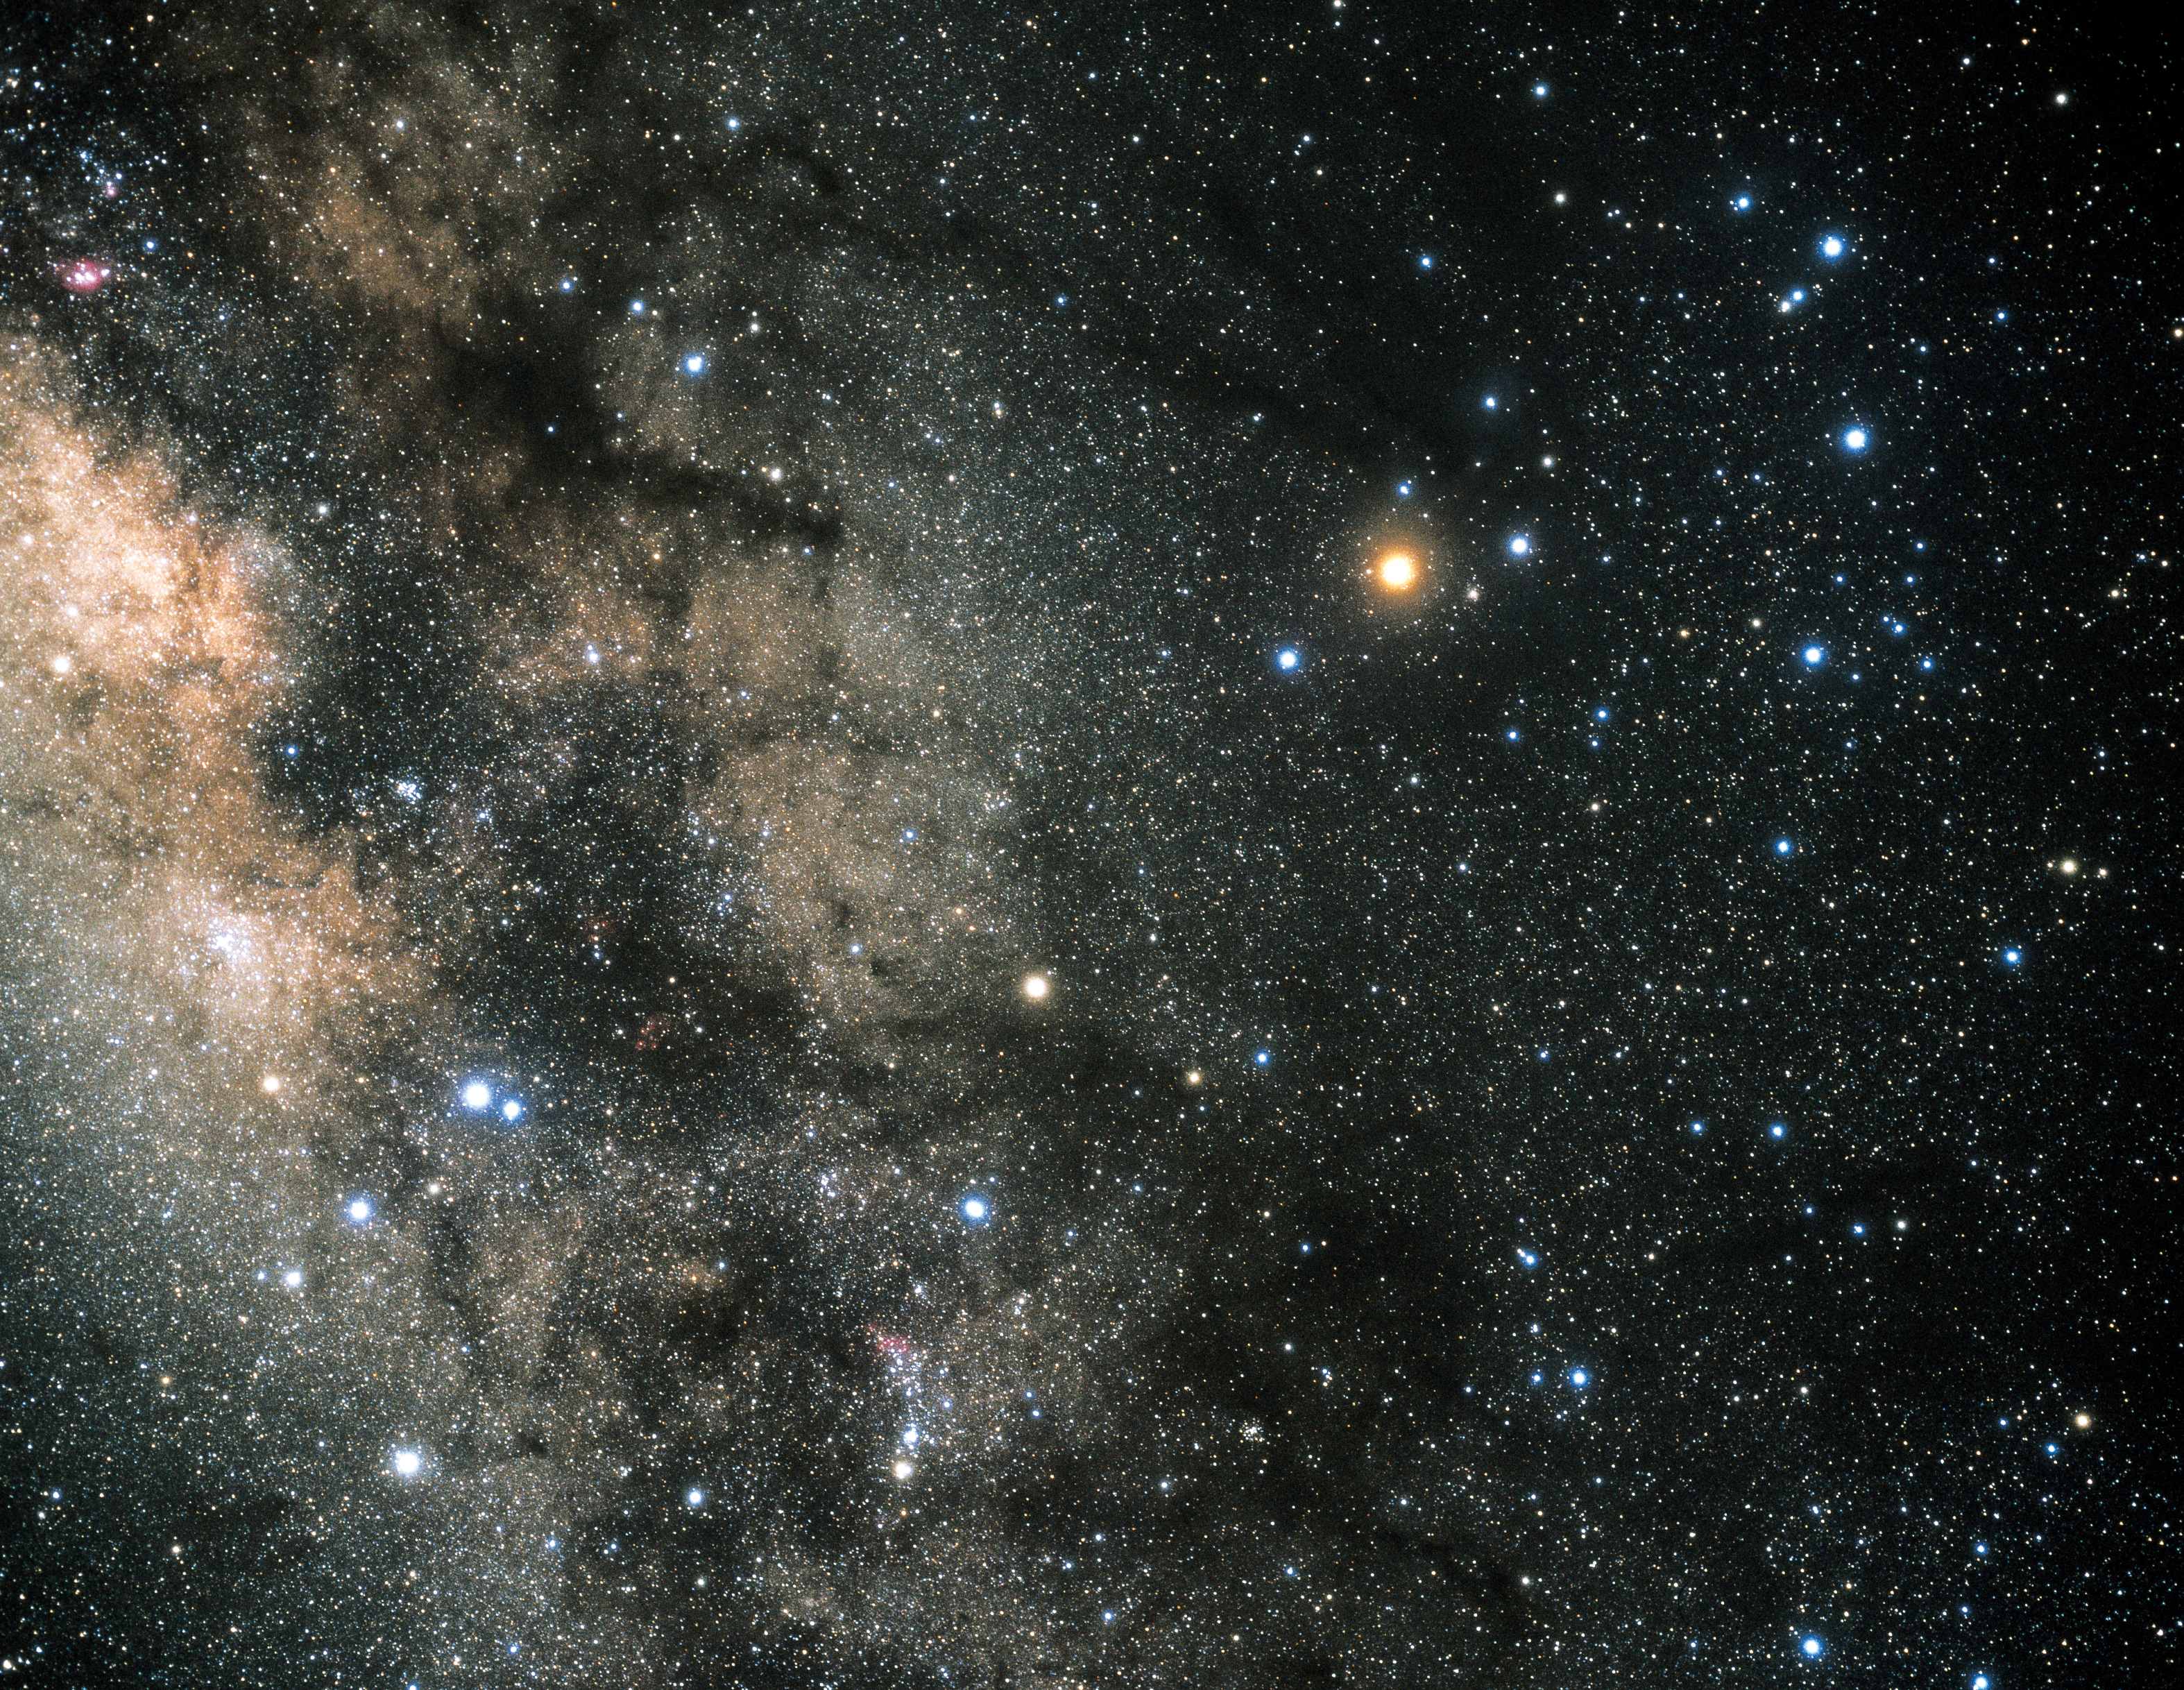

Constellation Scorpius (ground-based image)

Photo was taken by the Japanese astrophotographer Akira Fujii and shows a full view of the constellation of Scorpius. The centre of our Milky Way is seen on the left of the image.

Credit: Akira Fujii